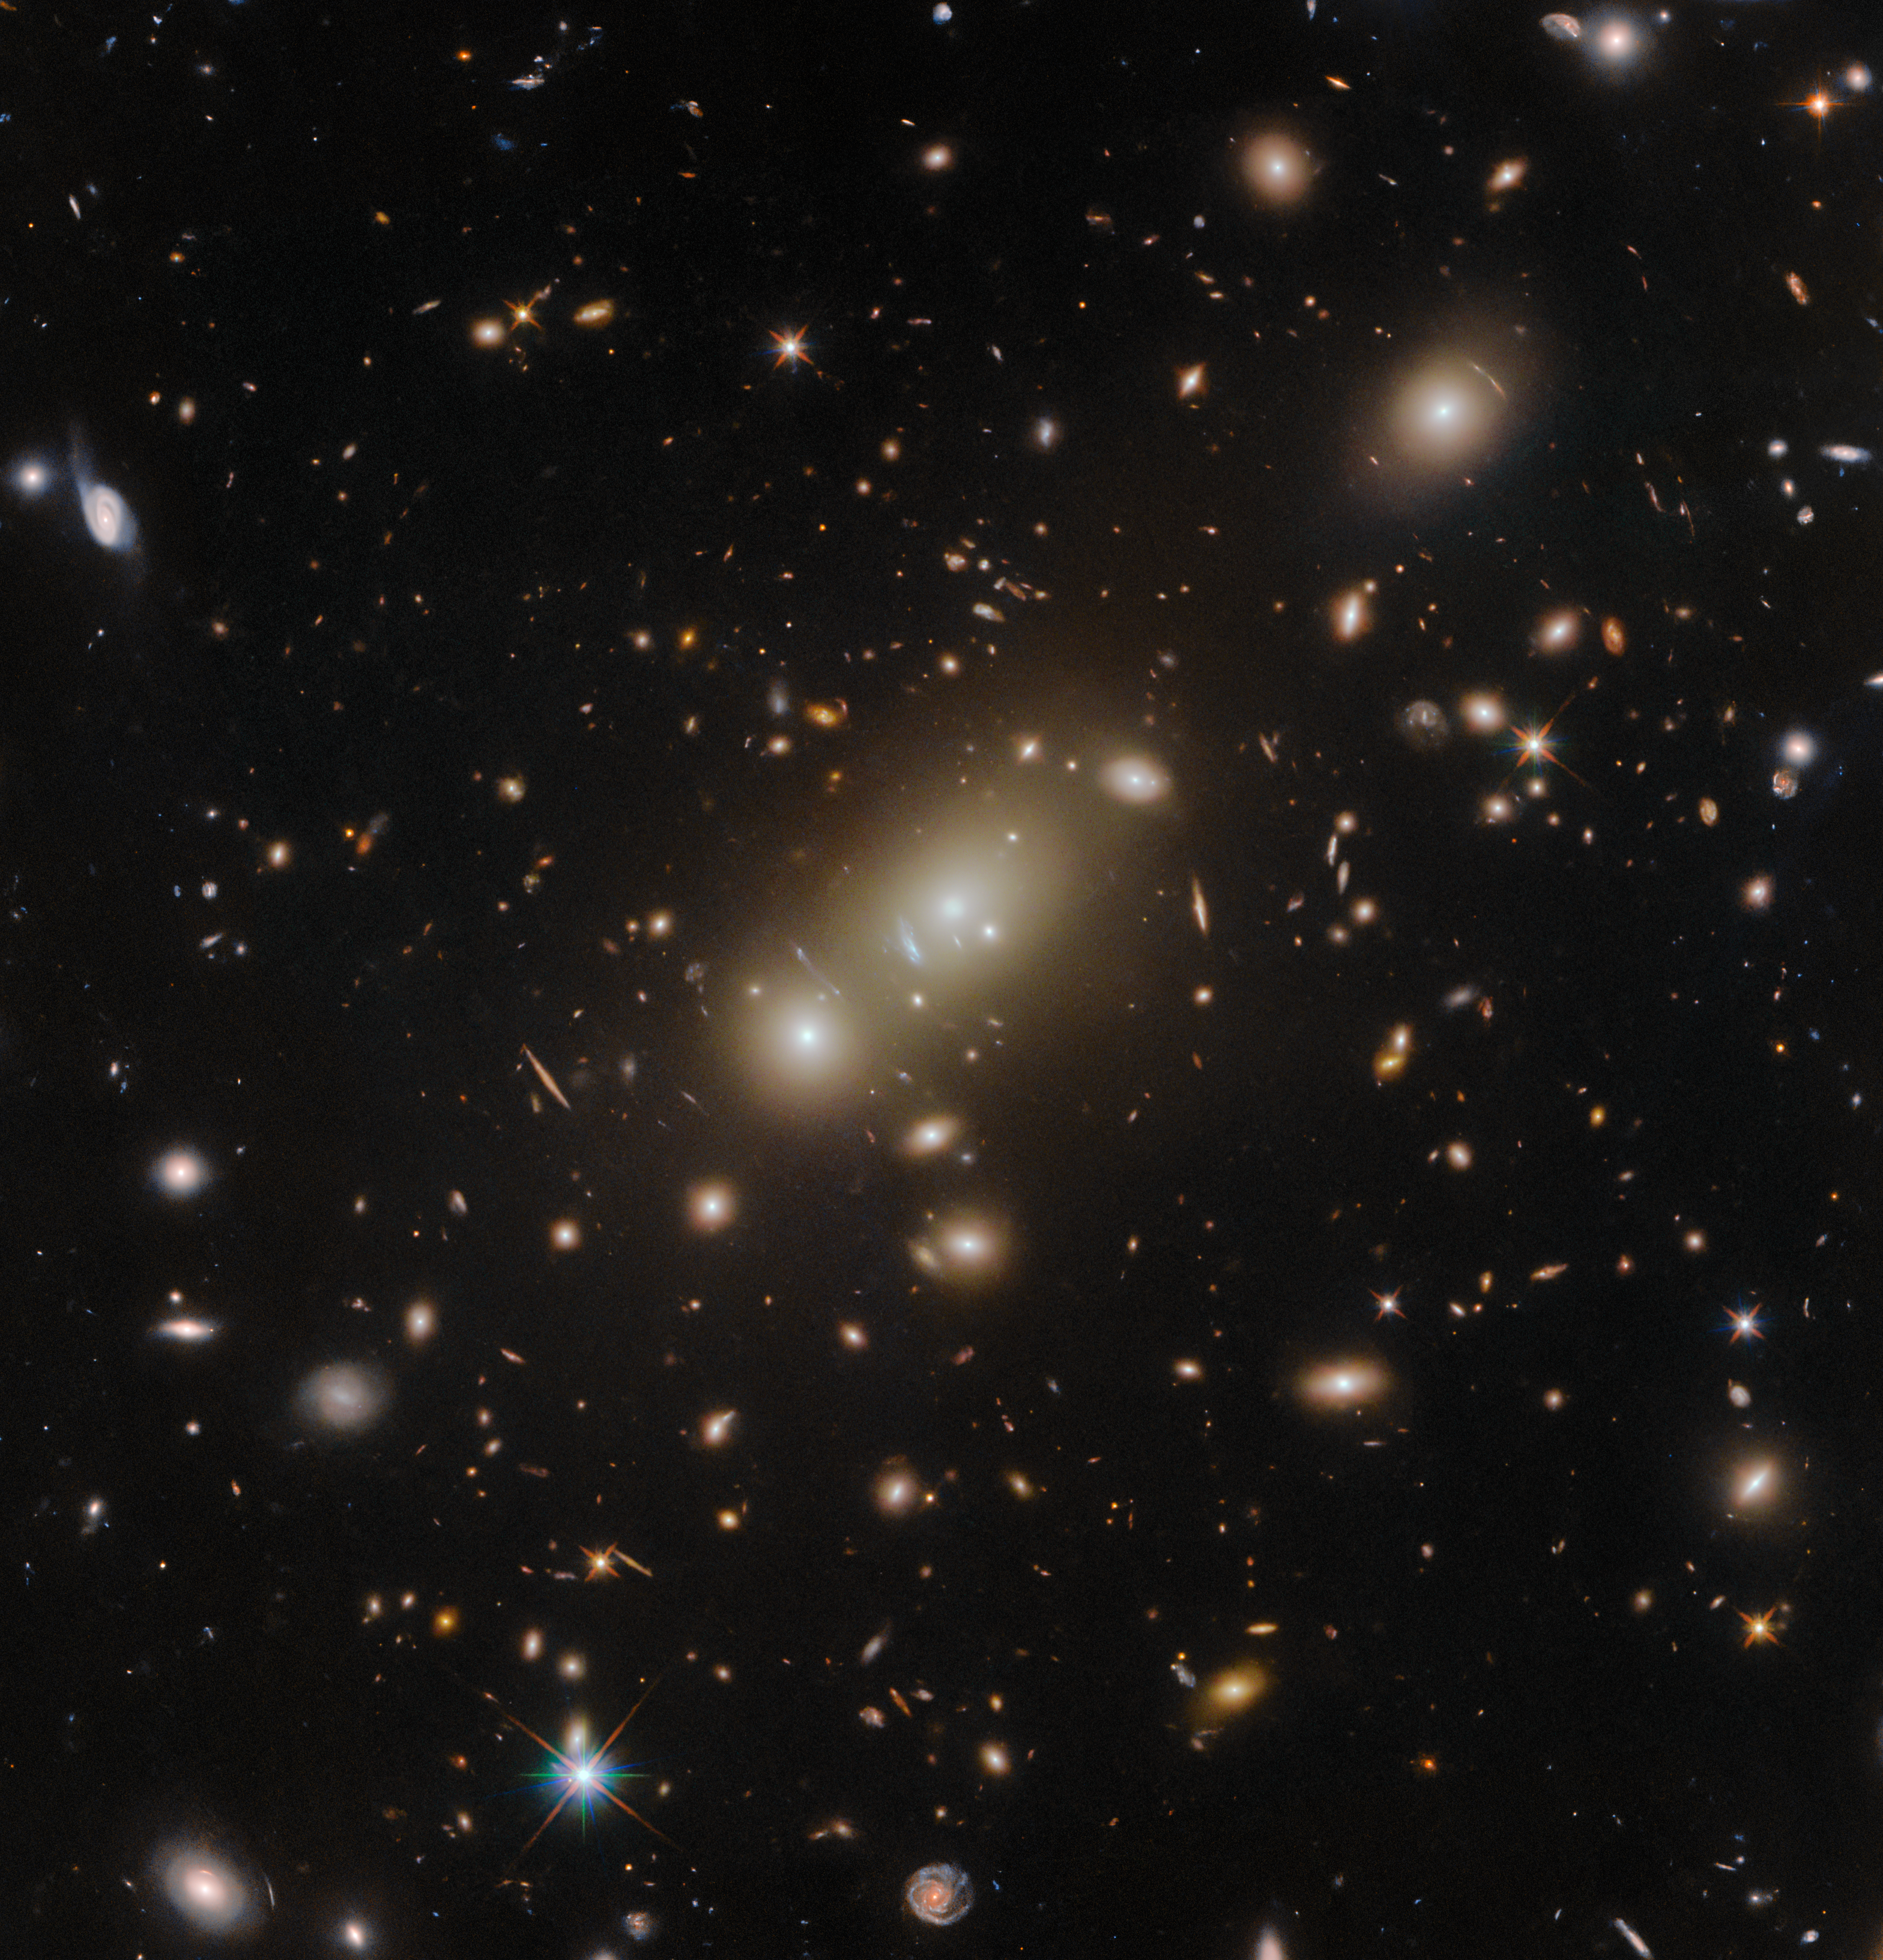

A clear view of a galaxy cluster

The massive cluster Abell 3322 is featured in this image from the NASA/ESA Hubble Space Telescope, in which the galaxy 2MASX J05101744-4519179 basks in the centre. This distant galaxy cluster is a cosmic leviathan that is highly luminous at X-ray wavelengths. Observing galaxy clusters like Abell 3322 can advance our understanding of the evolution and interactions of dark and luminous matter in galaxy clusters, and also reveals powerful gravitational ‘telescopes’ that magnify distant objects through gravitational lensing. Knowing the location of these lenses can enable future observations with both Hubble and the NASA/ESA/CSA James Webb Space Telescope. The galaxy cluster is located in the constellation Pictor, around 2.6 billion light-years from Earth.

The unusual alignment of the three brightest cluster galaxies in this image (two in a close pair in the centre of the image and a third in the upper right region) suggests that A3322 is observed in the process of formation. This is because at least two smaller clusters collide along an axis defined by the locations of their individual brightest cluster galaxies. However, the diffuse super-hot gas that permeates all massive galaxy clusters (and is visible only at x-ray wavelengths) is understood to be distributed in a single, almost perfectly spherical halo. In other words, it neither exhibits an elongation that follows the three-galaxy lineup, nor does it show signs of two (or more) individual cluster cores. Discrepancies like this are of great interest for astronomers who want to explore the differences in the dynamic behaviour of gas, galaxies, dark matter, and cluster collisions.

Two of Hubble’s instruments joined forces to create this image: Wide Field Camera 3 and the Advanced Camera for Surveys. Both are third-generation instruments that offer superb image quality and high sensitivity to astronomers studying a range of scientific questions. Both instruments provide images of wide areas of the night sky, but view slightly different parts of the electromagnetic spectrum. WFC3 spans the spectrum from the ultraviolet through to visible light and the near-infrared. In contrast to the wide panchromatic coverage of WFC3, ACS was optimised for visible-light observations. Getting the best from Hubble requires instruments to use built-in corrective optics to account for the effects of the primary mirror's aberration. During the construction of Hubble, a faulty instrument caused the primary mirror to be very precisely ground to slightly the wrong shape by only 0.0002 mm. A corrective instrument called COSTAR was developed to account for this tiny discrepancy, and later instruments like WFC3 and ACS were built with their own corrective optics.

Credit: ESA/Hubble & NASA, H. Ebeling